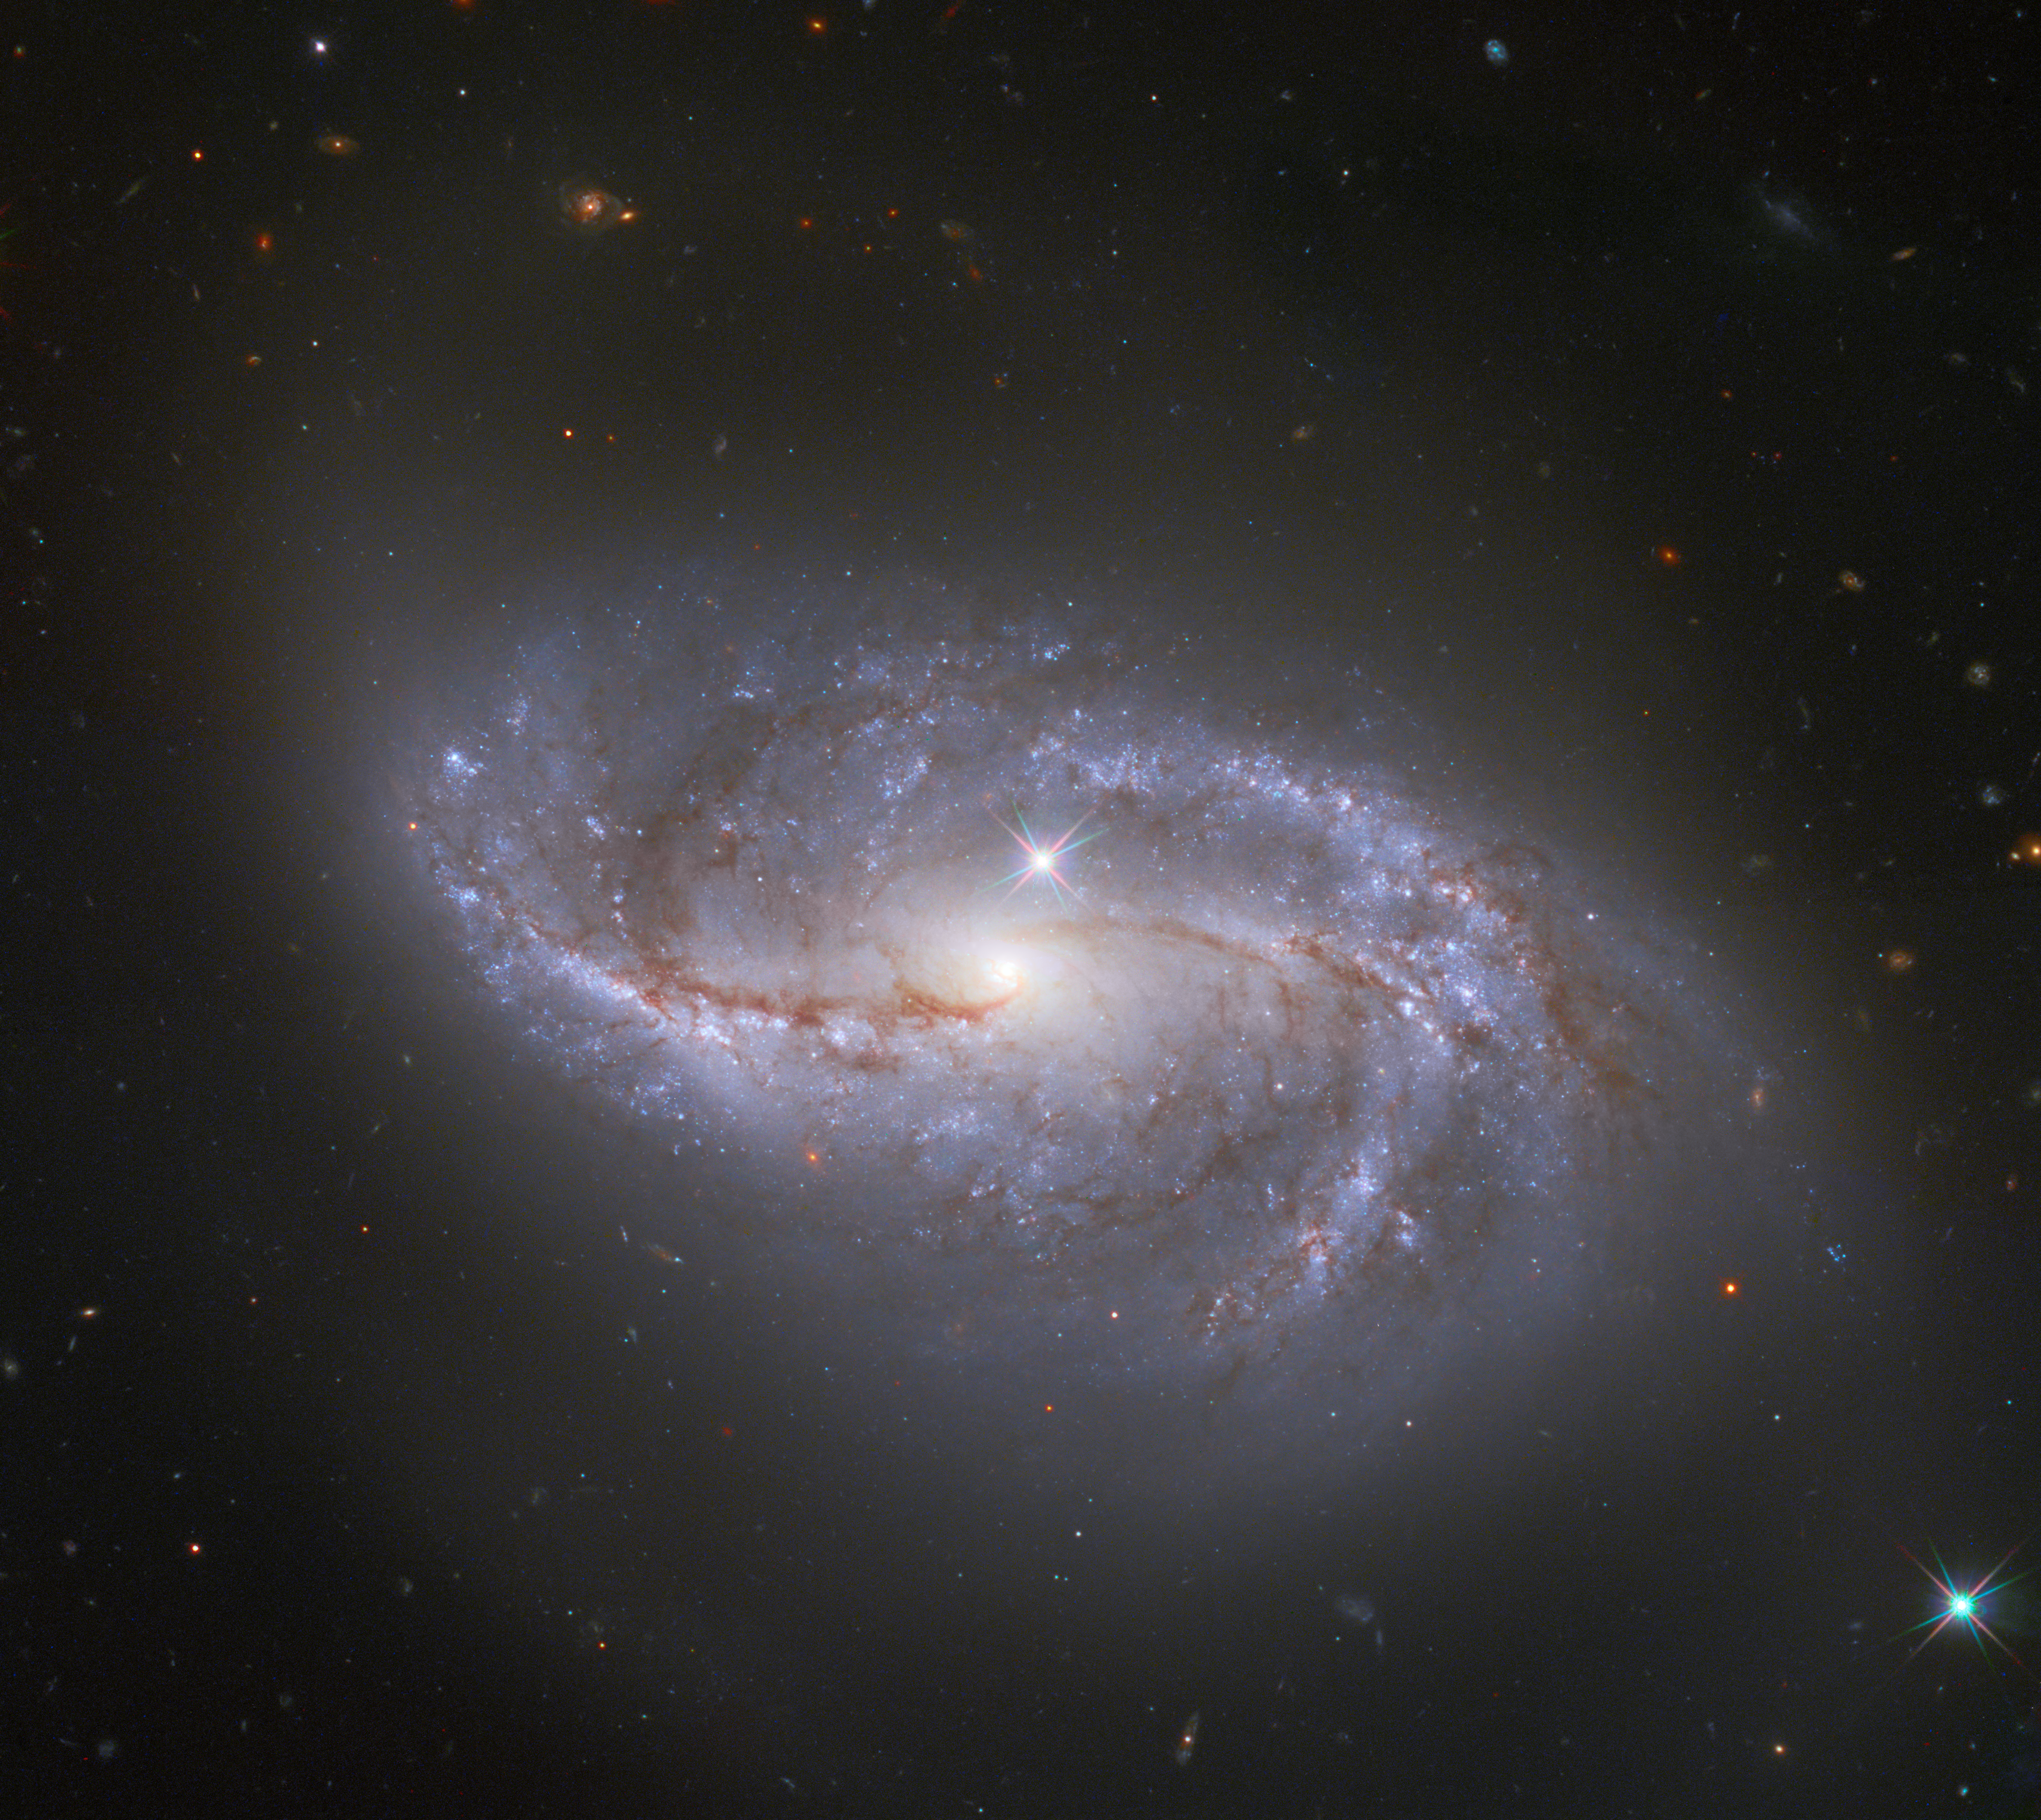

One Amongst Millions

Looking deep into the Universe, the NASA/ESA Hubble Space Telescope catches a passing glimpse of the numerous arm-like structures that sweep around this barred spiral galaxy, known as NGC 2608. Appearing as a slightly stretched, smaller version of our Milky Way, the peppered blue and red spiral arms are anchored together by the prominent horizontal central bar of the galaxy.

In Hubble photos, bright Milky Way stars will sometimes appear as pinpoints of light with prominent lens flares. A star with these features is seen in the lower right corner of the image, and another can be spotted just above the pale centre of the galaxy. The majority of the fainter points around NGC 2608, however, lack these features, and upon closer inspection they are revealed to be thousands of distant galaxies. NGC 2608 is just one among an uncountable number of kindred structures.

Similar expanses of galaxies can be observed in other Hubble images such as the Hubble Deep Field which recorded over 3000 galaxies in one field of view.

Credit: ESA/Hubble & NASA, A. Riess et al.